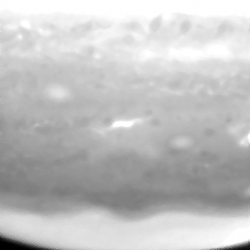

Jupiter Comet P/Shoemaker-Levy 9 Impact Individual Image

This image shows the aftermath of comet P/Shoemaker-Levy 9's impact with Jupiter.

Credit: NASA & ESA